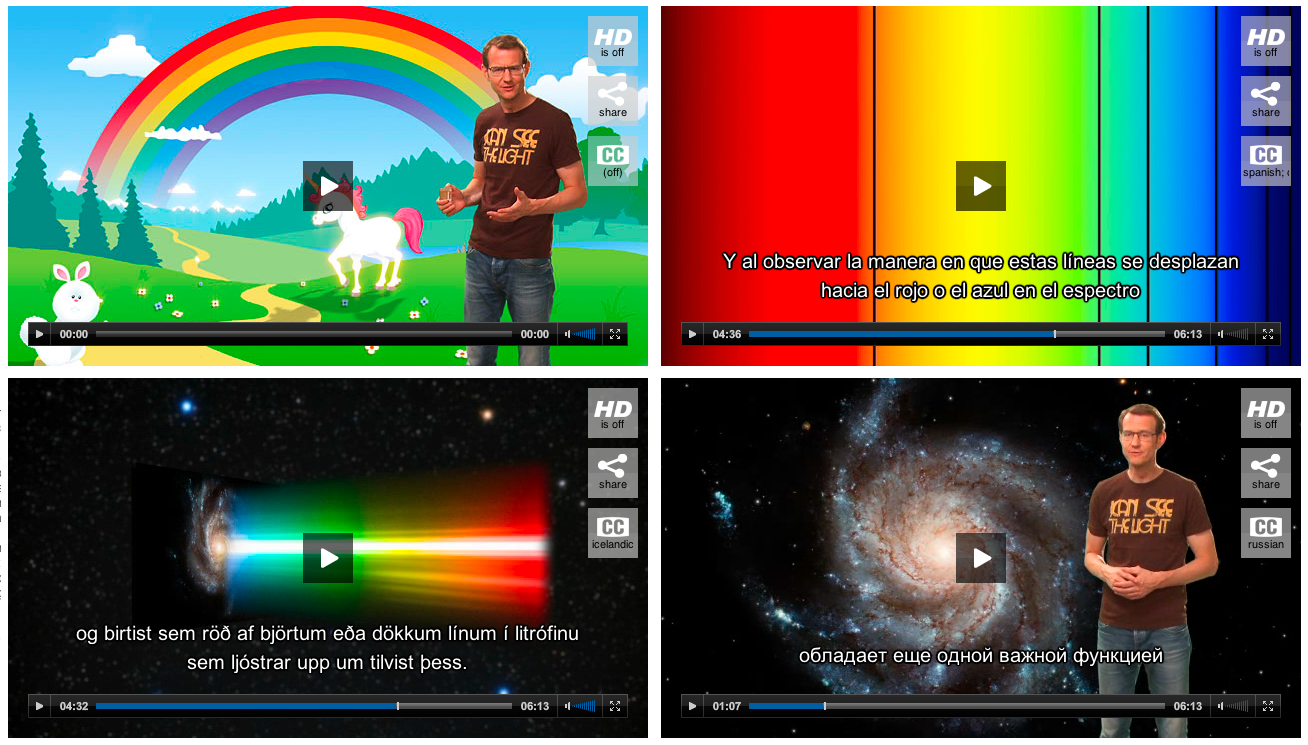

Screenshots of Hubblecast players

Selecting subtitles in different languages is easy: click on the "CC" button.

Credit: NASA & ESA